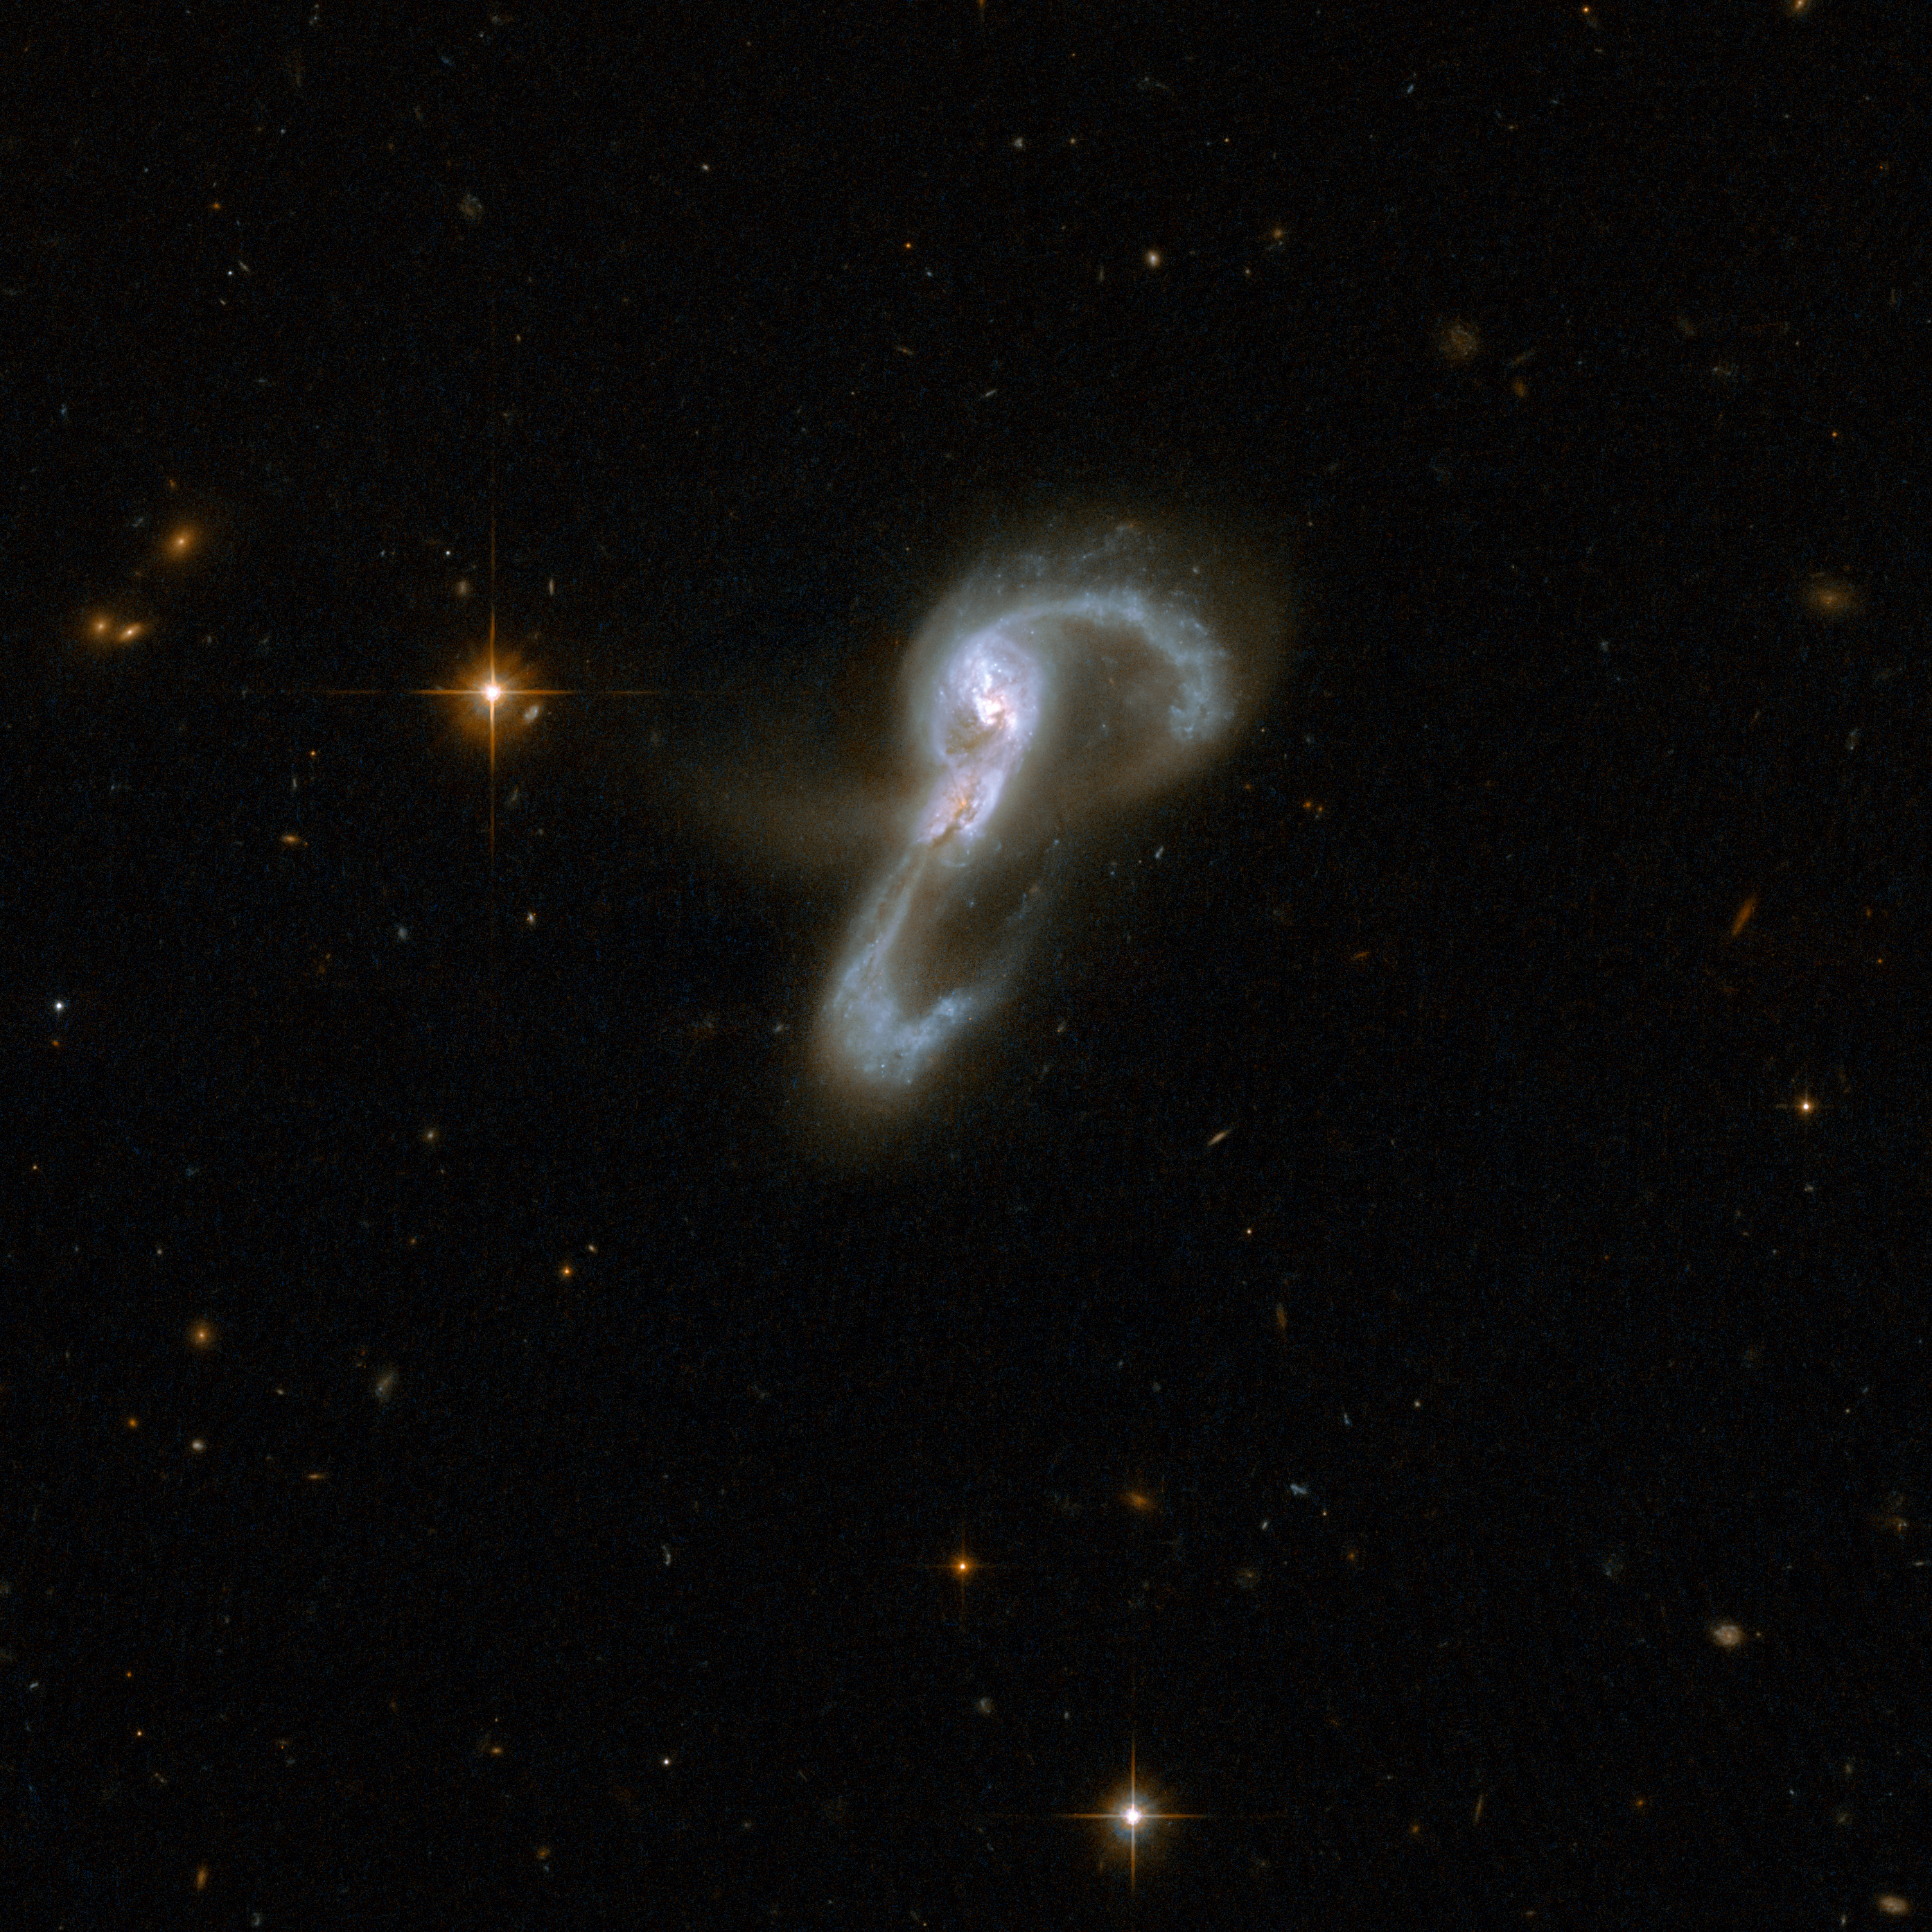

VV 705

Markarian 848 consists of two galaxies that seem to be embracing each other. Two long, highly curved arms of gas and stars emerge from a central region with two cores. One arm, curving clockwise, stretches to the top of the image where it makes a U-turn and interlocks with the other arm that curves up counter-clockwise from below. The two cores are 16,000 light-years apart. The pair is thought to be midway through a merger. Markarian 848 is located in the constellation of Boötes, the Bear Watcher, and is approximately 550 million light-years away from Earth.

This image is part of a large collection of 59 images of merging galaxies taken by the Hubble Space Telescope and released on the occasion of its 18th anniversary on 24th April 2008.

Credit: NASA, ESA, the Hubble Heritage Team (STScI/AURA)-ESA/Hubble Collaboration and A. Evans (University of Virginia, Charlottesville/NRAO/Stony Brook University)